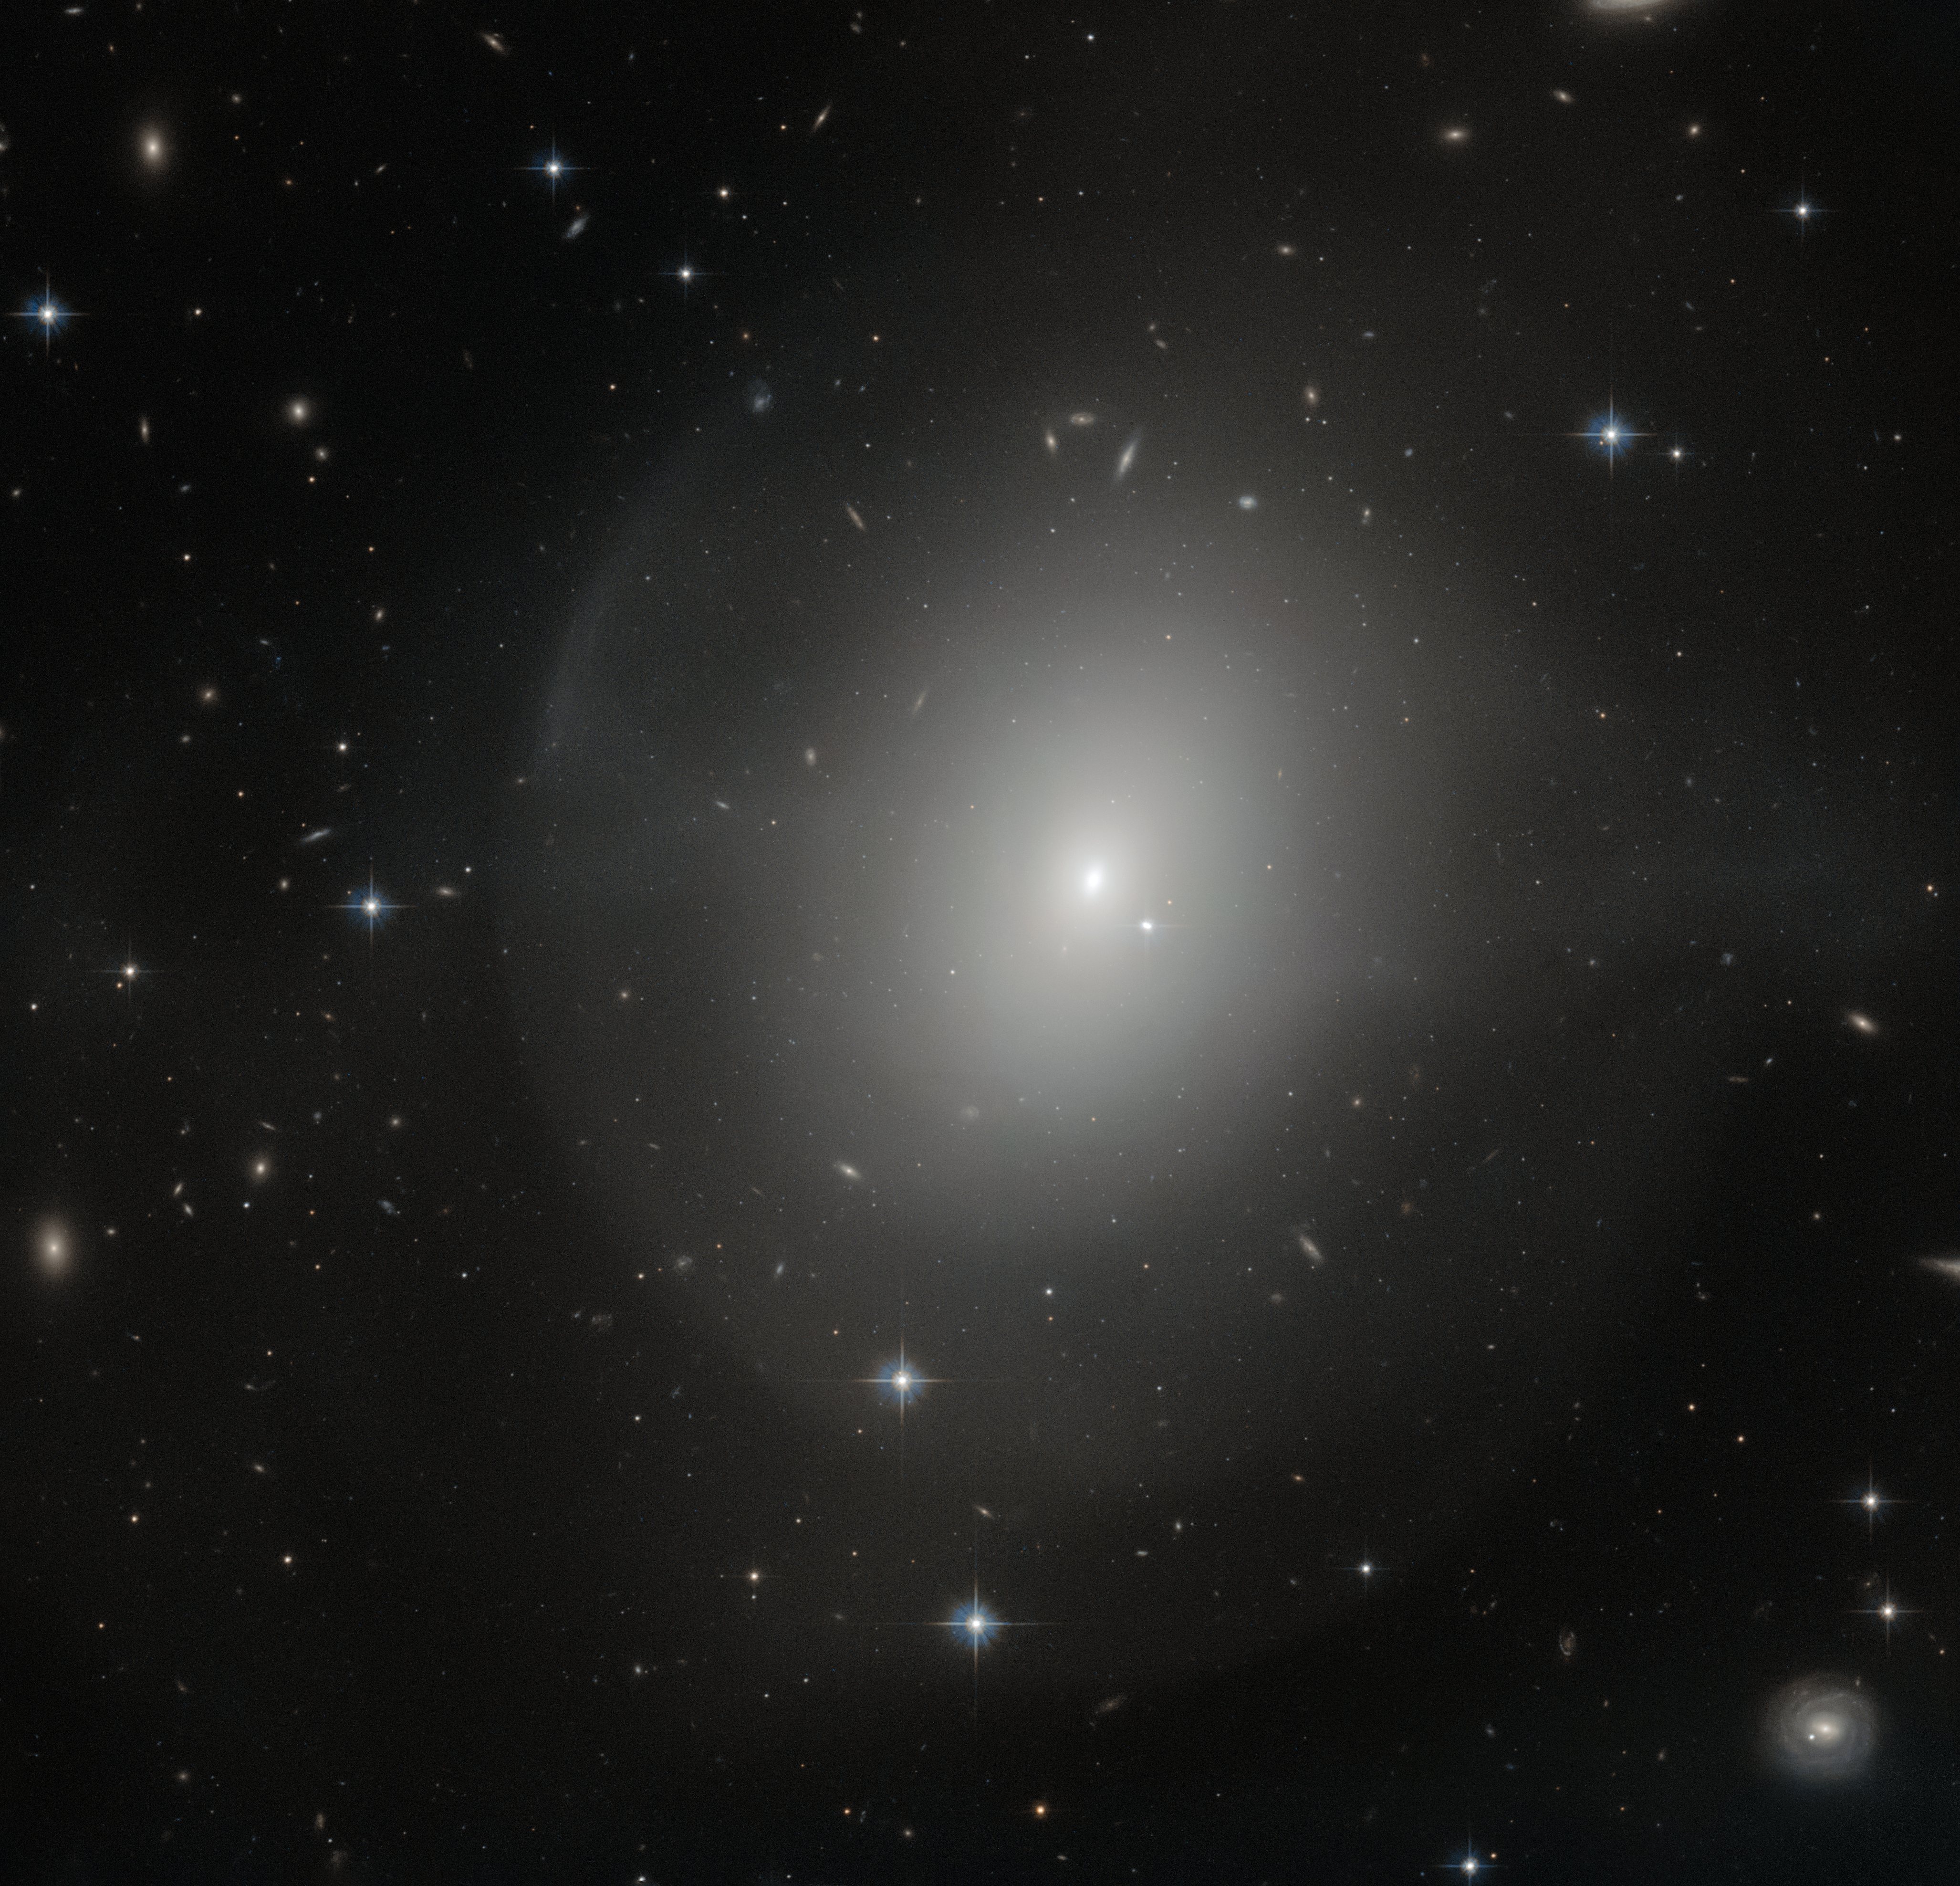

Young and dynamic

This NASA/ESA Hubble Space Telescope image shows an elliptical galaxy called NGC 2865. It lies just over 100 million light-years away from us in the constellation of Hydra — The Sea Serpent — and was discovered in 1835 by astronomer John Herschel.

Elliptical galaxies are usually filled with old, dying stars. NGC 2865, however, is relatively youthful and dynamic, with a rapidly rotating disc full of young stars and metal-rich gas. For an elliptical galaxy it contains an unusually high number of young stars — suggesting that a galaxy-wide starburst took place about one billion years ago.

The starburst itself was induced by a merger between a spiral galaxy, similar to our galaxy, the Milky Way, and an elliptical galaxy some three times more massive — the progenitor galaxy of NGC 2865. The new gas from the spiral galaxy revitalised the dying population of old stars in the elliptical galaxy, and several new generations of stars were born.

The faint halo surrounding the galaxy, visible in this image, is also a result of this merger. It consists of cold gas that was ripped away from the spiral galaxy during the merging process. The gas now forms an almost closed shell around its host galaxy.

A version of this image was entered into the Hubble’s Hidden Treasures image processing competition by contestant Judy Schmidt.

Credit: ESA/Hubble & NASA Acknowledgement: Judy Schmidt